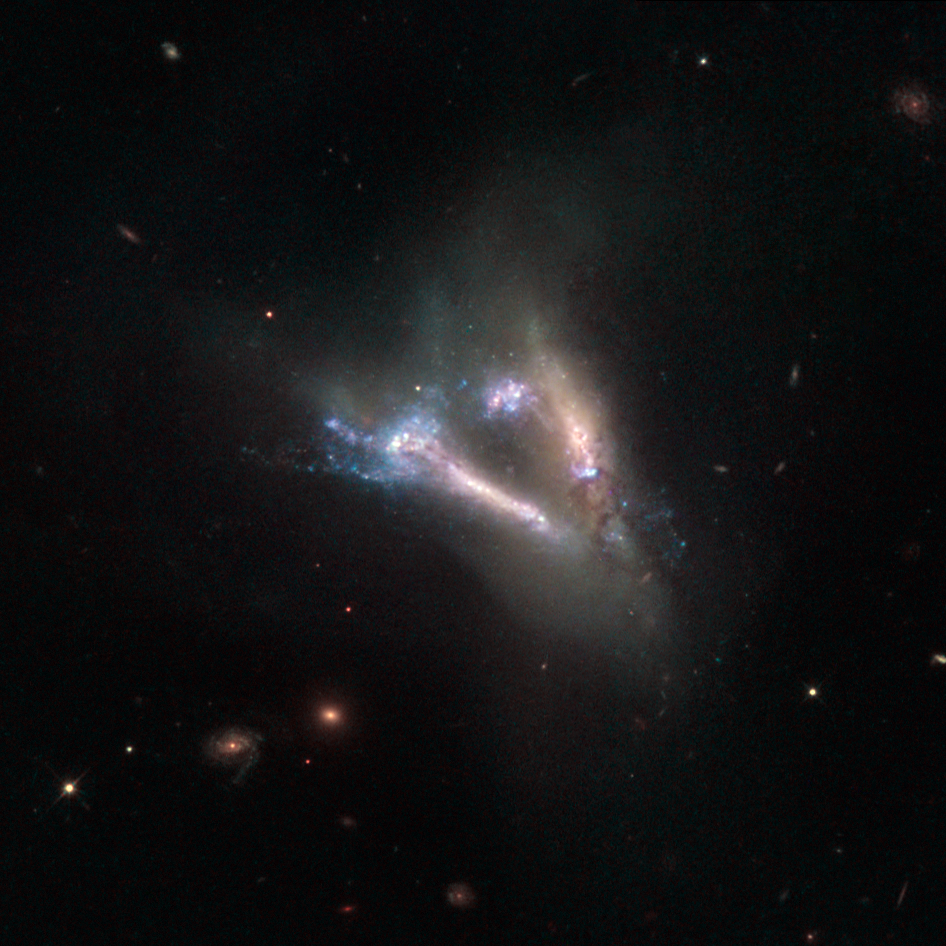

Cosmic “flying V” of merging galaxies

This large “flying V” is actually two distinct objects — a pair of interacting galaxies known as IC 2184. Both the galaxies are seen almost edge-on in the large, faint northern constellation of Camelopardalis (The Giraffe), and can be seen as bright streaks of light surrounded by the ghostly shapes of their tidal tails.

These tidal tails are thin, elongated streams of gas, dust and stars that extend away from a galaxy into space. They occur when galaxies gravitationally interact with one another, and material is sheared from the outer edges of each body and flung out into space in opposite directions, forming two tails. They almost always appear curved, so when they are seen to be relatively straight, as in this image, it is clear that we are viewing the galaxies side-on.

Also visible in this image are bursts of bright blue, pinpointing hot regions where the stars from both galaxies have begun to crash together during the merger.

The image consists of visible and infrared observations from Hubble’s Wide Field and Planetary Camera 2.

A version of this picture was entered into the Hubble’s Hidden Treasures image-processing competition by contestant Serge Meunier.

Credit: ESA/Hubble & NASA